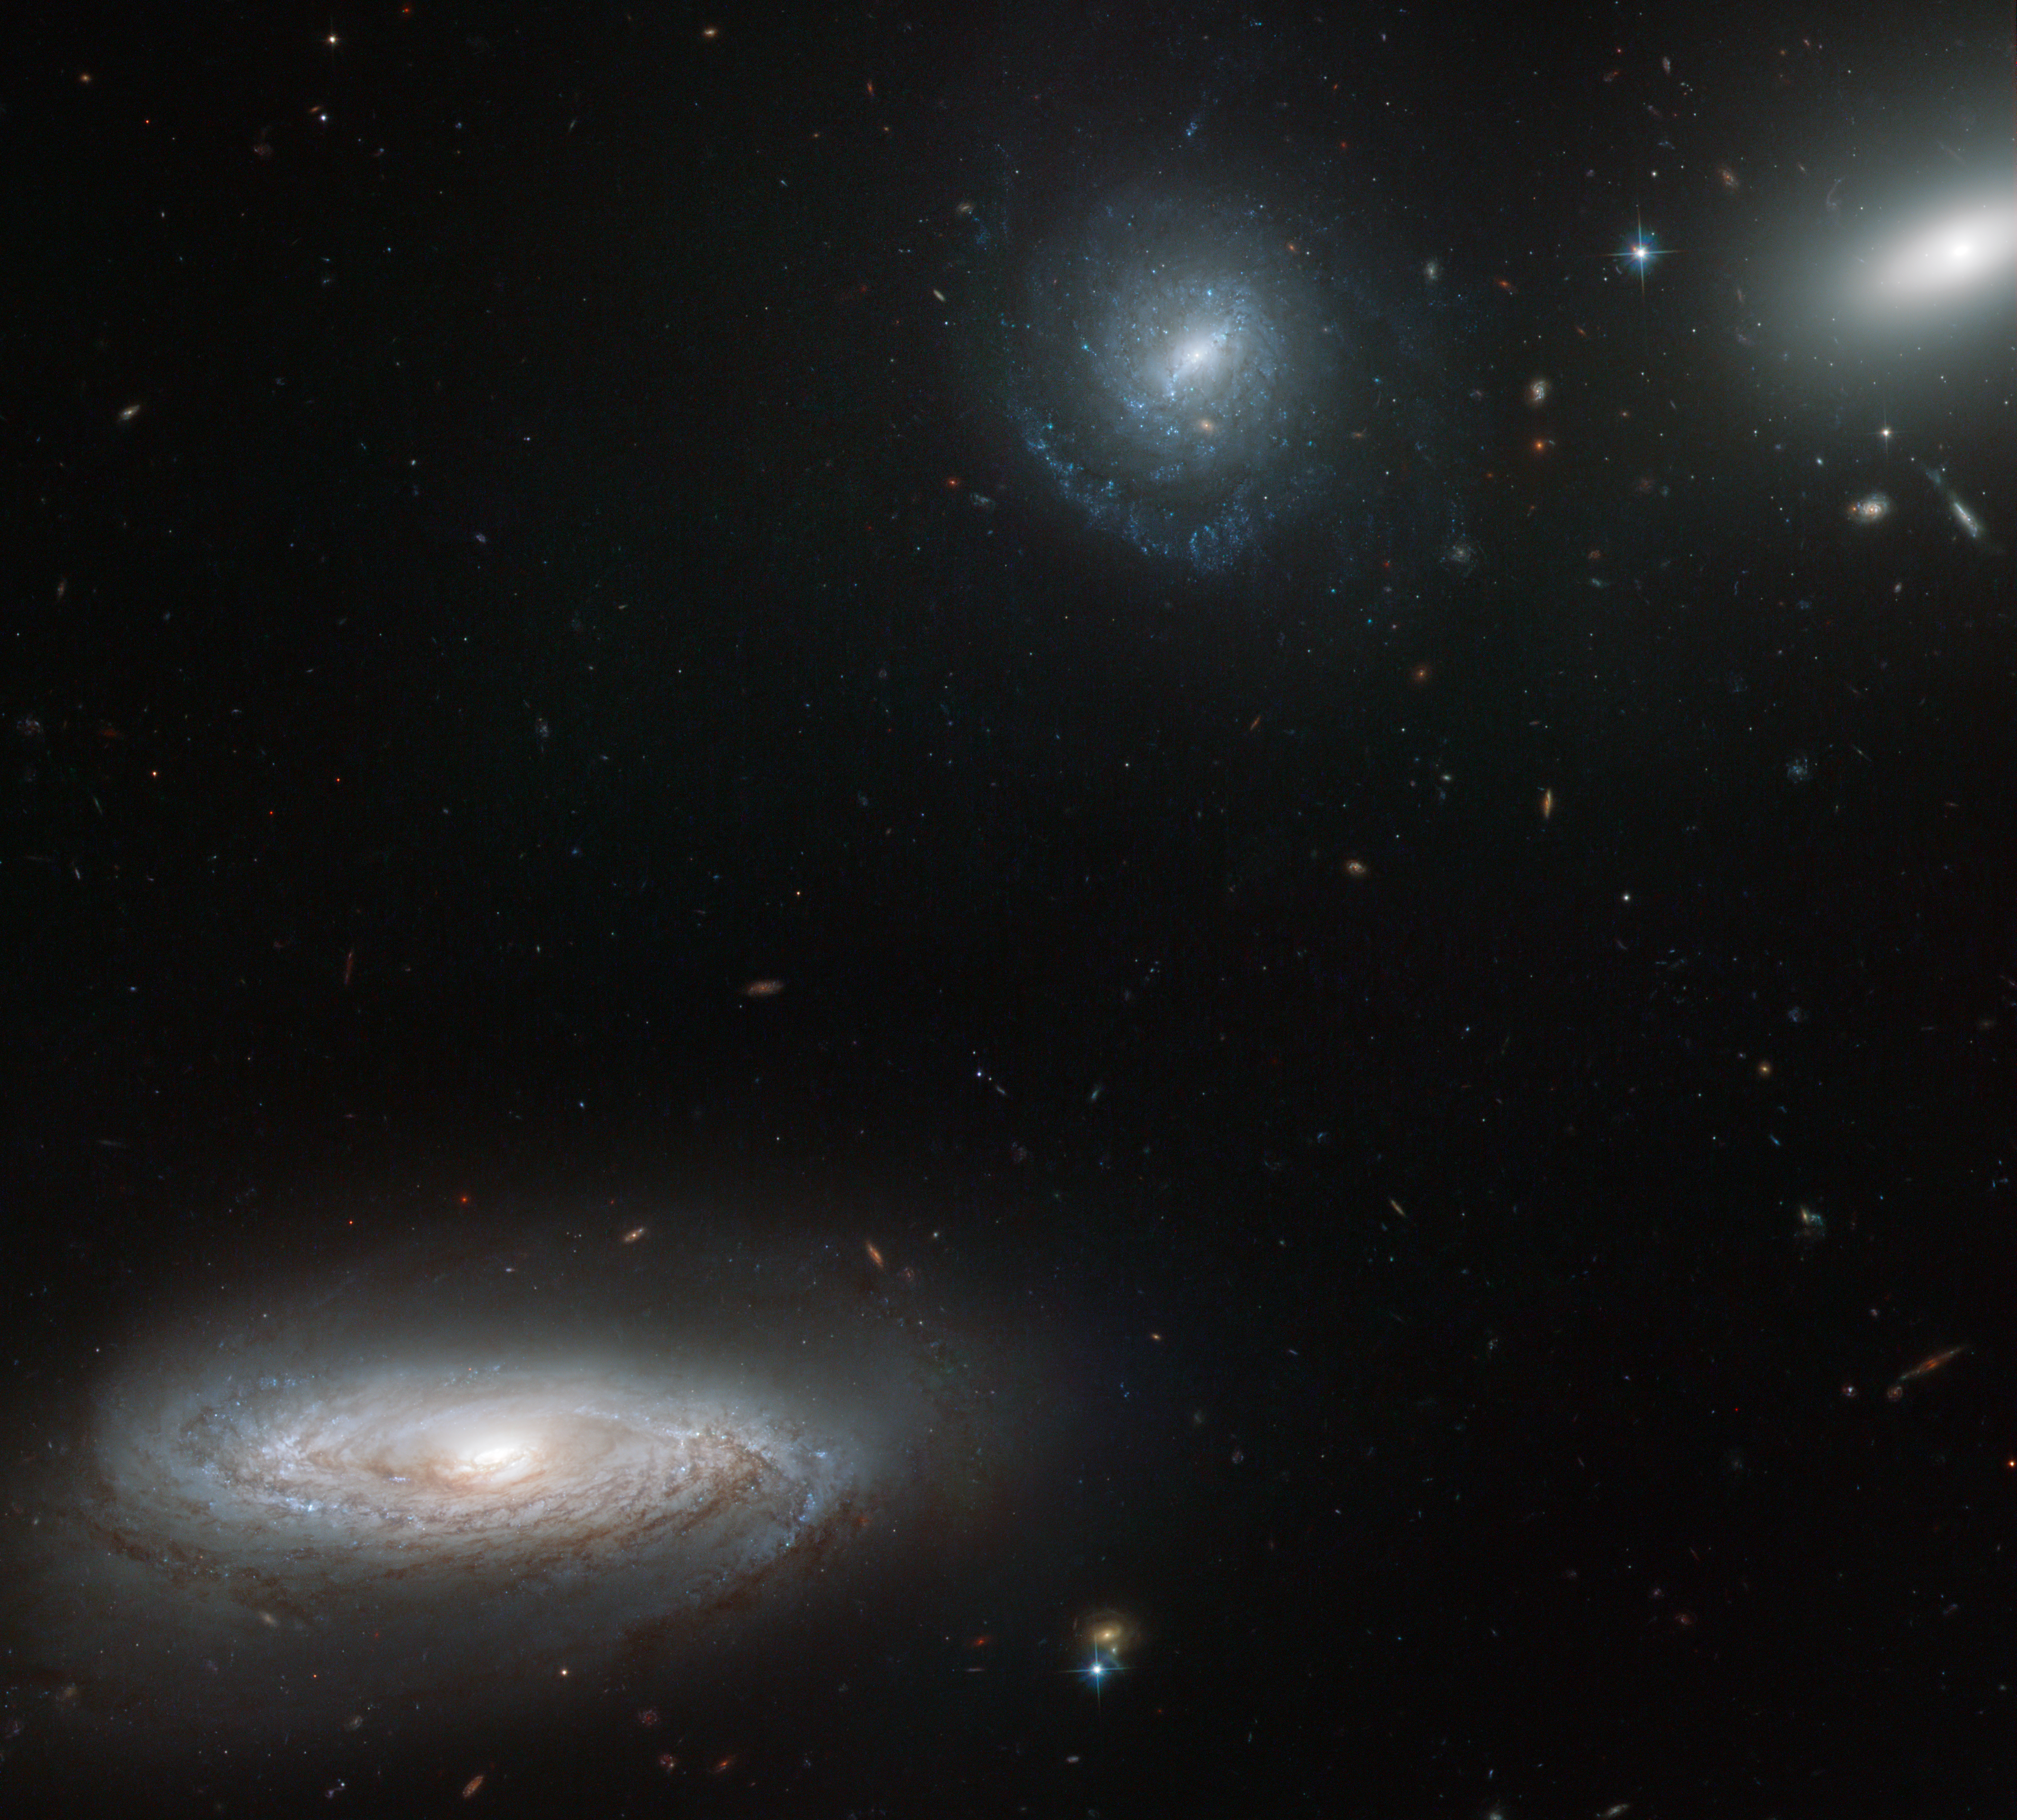

Crowded, but suspiciously quiet?

The NASA/ESA Hubble Space Telescope has imaged part of the Hickson Compact Group 7, or HCG 7 for short. This grouping is composed of one lenticular (lens-shaped) and three spiral galaxies in close proximity. In this image, one of the spirals dominates the foreground, with many more distant galaxies peppering the background. Observing tightly-knit galaxy groups like HCG 7 is important because they evolve in a different way from their more spaced-out counterparts in less crowded regions of the Universe.

A recent study using Hubble data analysed the star clusters in HCG 7. Three hundred young clusters and 150 globular clusters were charted, and their ages and distributions measured. The results suggest that the rate of star formation has been fairly steady through time, although quite high in the central regions. Additional studies, including searches for material between the galaxies, hint that the stars in the HCG 7 galaxies formed by converting their gas without any gravitational influences caused by merging with other galaxies. This is puzzling, as the galaxies are depleting their supplies of gas at a rate that suggests that they have merged in the past.

This raises the question of whether the group really has evolved serenely, or if there are mysterious processes at work that are yet to be understood. The currently known information is contradictory and an encouragement for further studies to discover the real story behind HCG 7.

This picture was created from images taken with the Wide Field Channel of the Advanced Camera for Surveys. Images through a blue filter (F435W, coloured blue), yellow-orange (F606W, coloured green) and near-infrared (F814W, coloured red) filters were combined. The total exposure times were 1710 s, 1230 s and 1065 s per filter, respectively, and the field of view is 3.3 x 3.0 arcminutes.

A paper from the Astrophysical Journal discussing these recent discoveries about HCG 7 can be read here.

Credit: ESA/Hubble & NASA